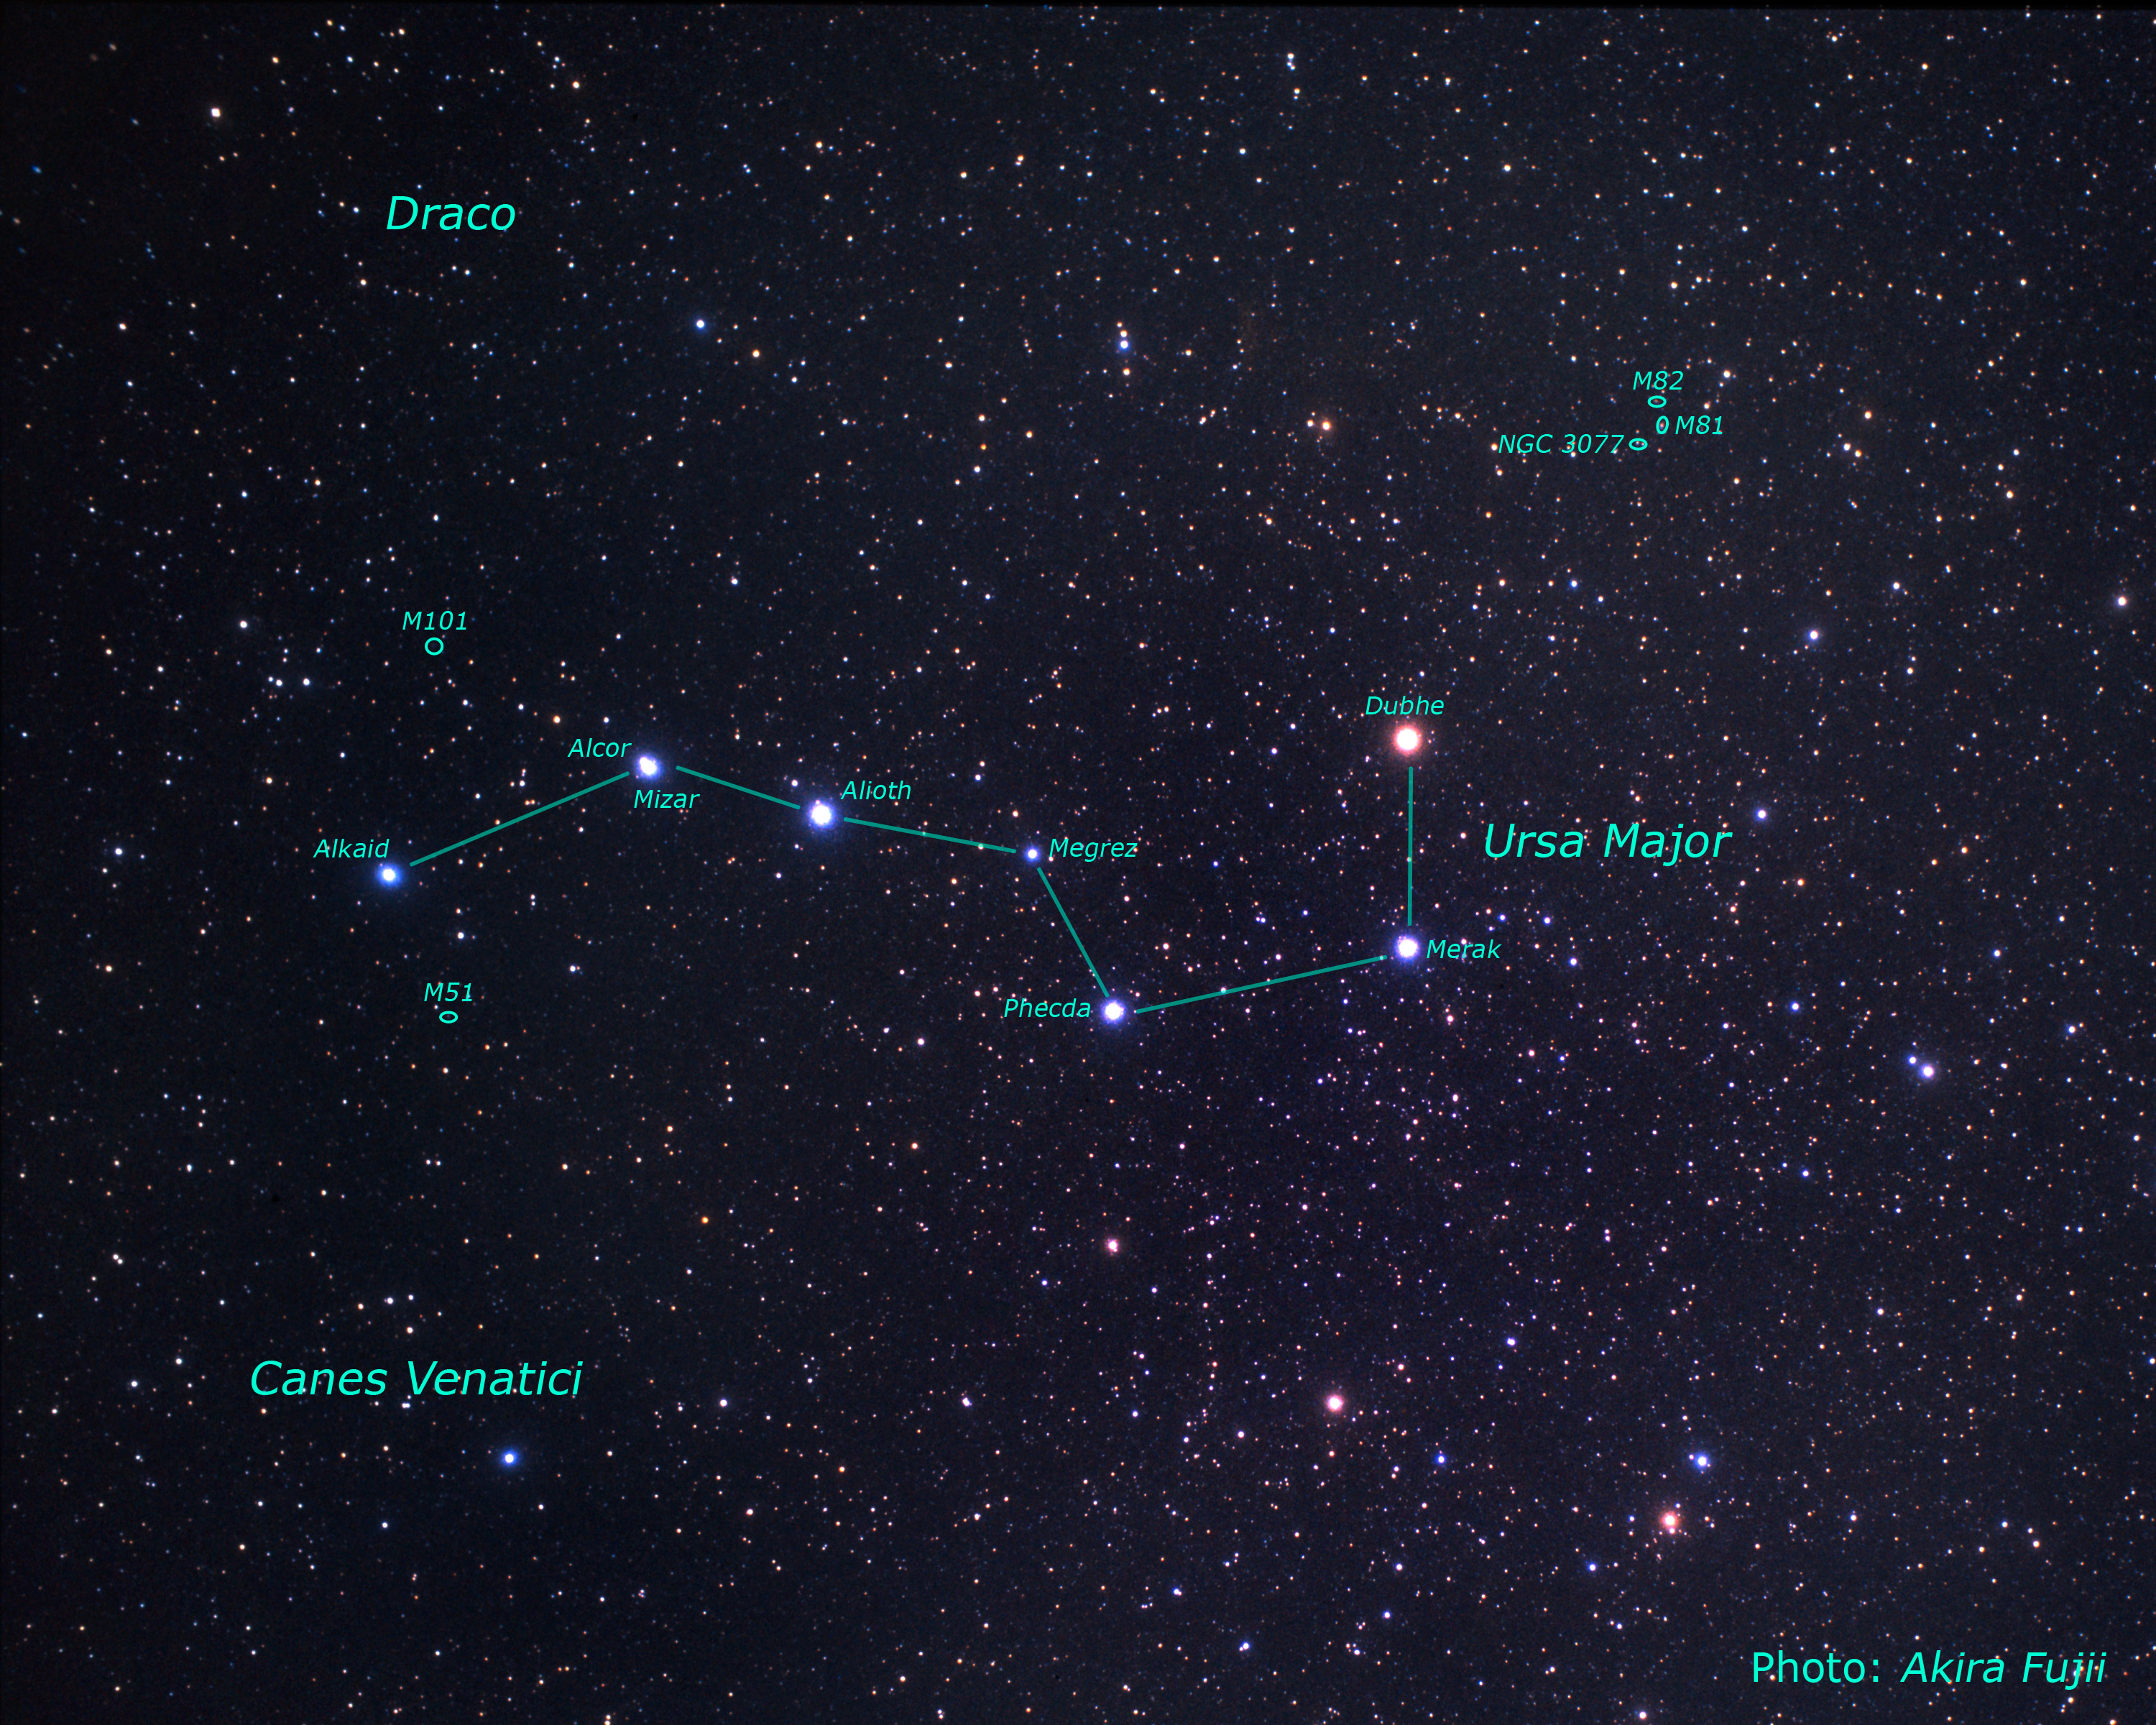

Location of the M81/M82 galaxy group on the sky (ground-based image)

A wide-field view of the constellation of Ursa Major, the asterism known as "The Plough" or the "Big Dipper".

Credit: NASA, ESA, Z. Levay (STScI) and A. Fujii